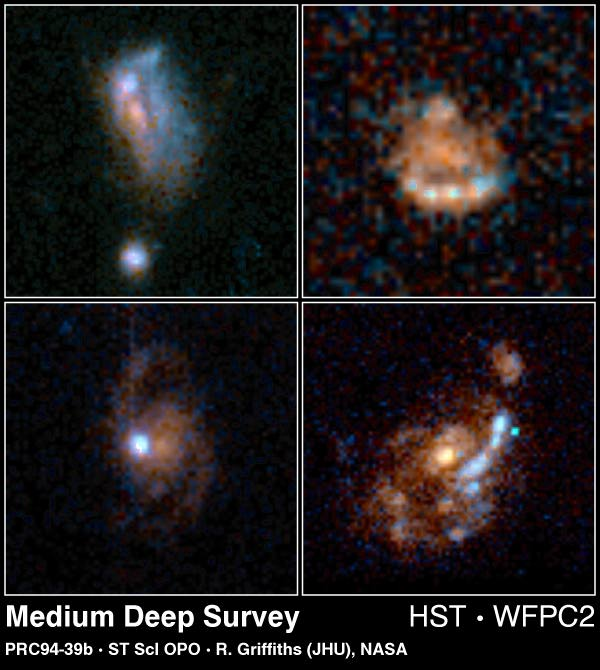

Normal Galaxies from HST Medium Deep Survey

Selection of normal spiral galaxies estimated to be at a distance of 5 to 7 billion light-years away. It is thought that these galaxies existed when the universe was half its present age. In this mosaic, the spiral or disk galaxies are seen at various inclinations from edge-on to face-on.

Credit: Richard Griffiths (JHU)